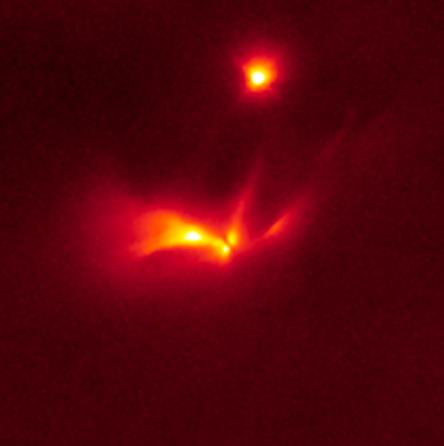

Hubble image of LRLL 54361

This infrared image from the NASA/ESA Hubble Space Telescope shows an image of protostellar object LRLL 54361.

The protostar is letting off flashes of light every 25.3 days.

Credit: NASA, ESA, and J. Muzerolle (STScI)